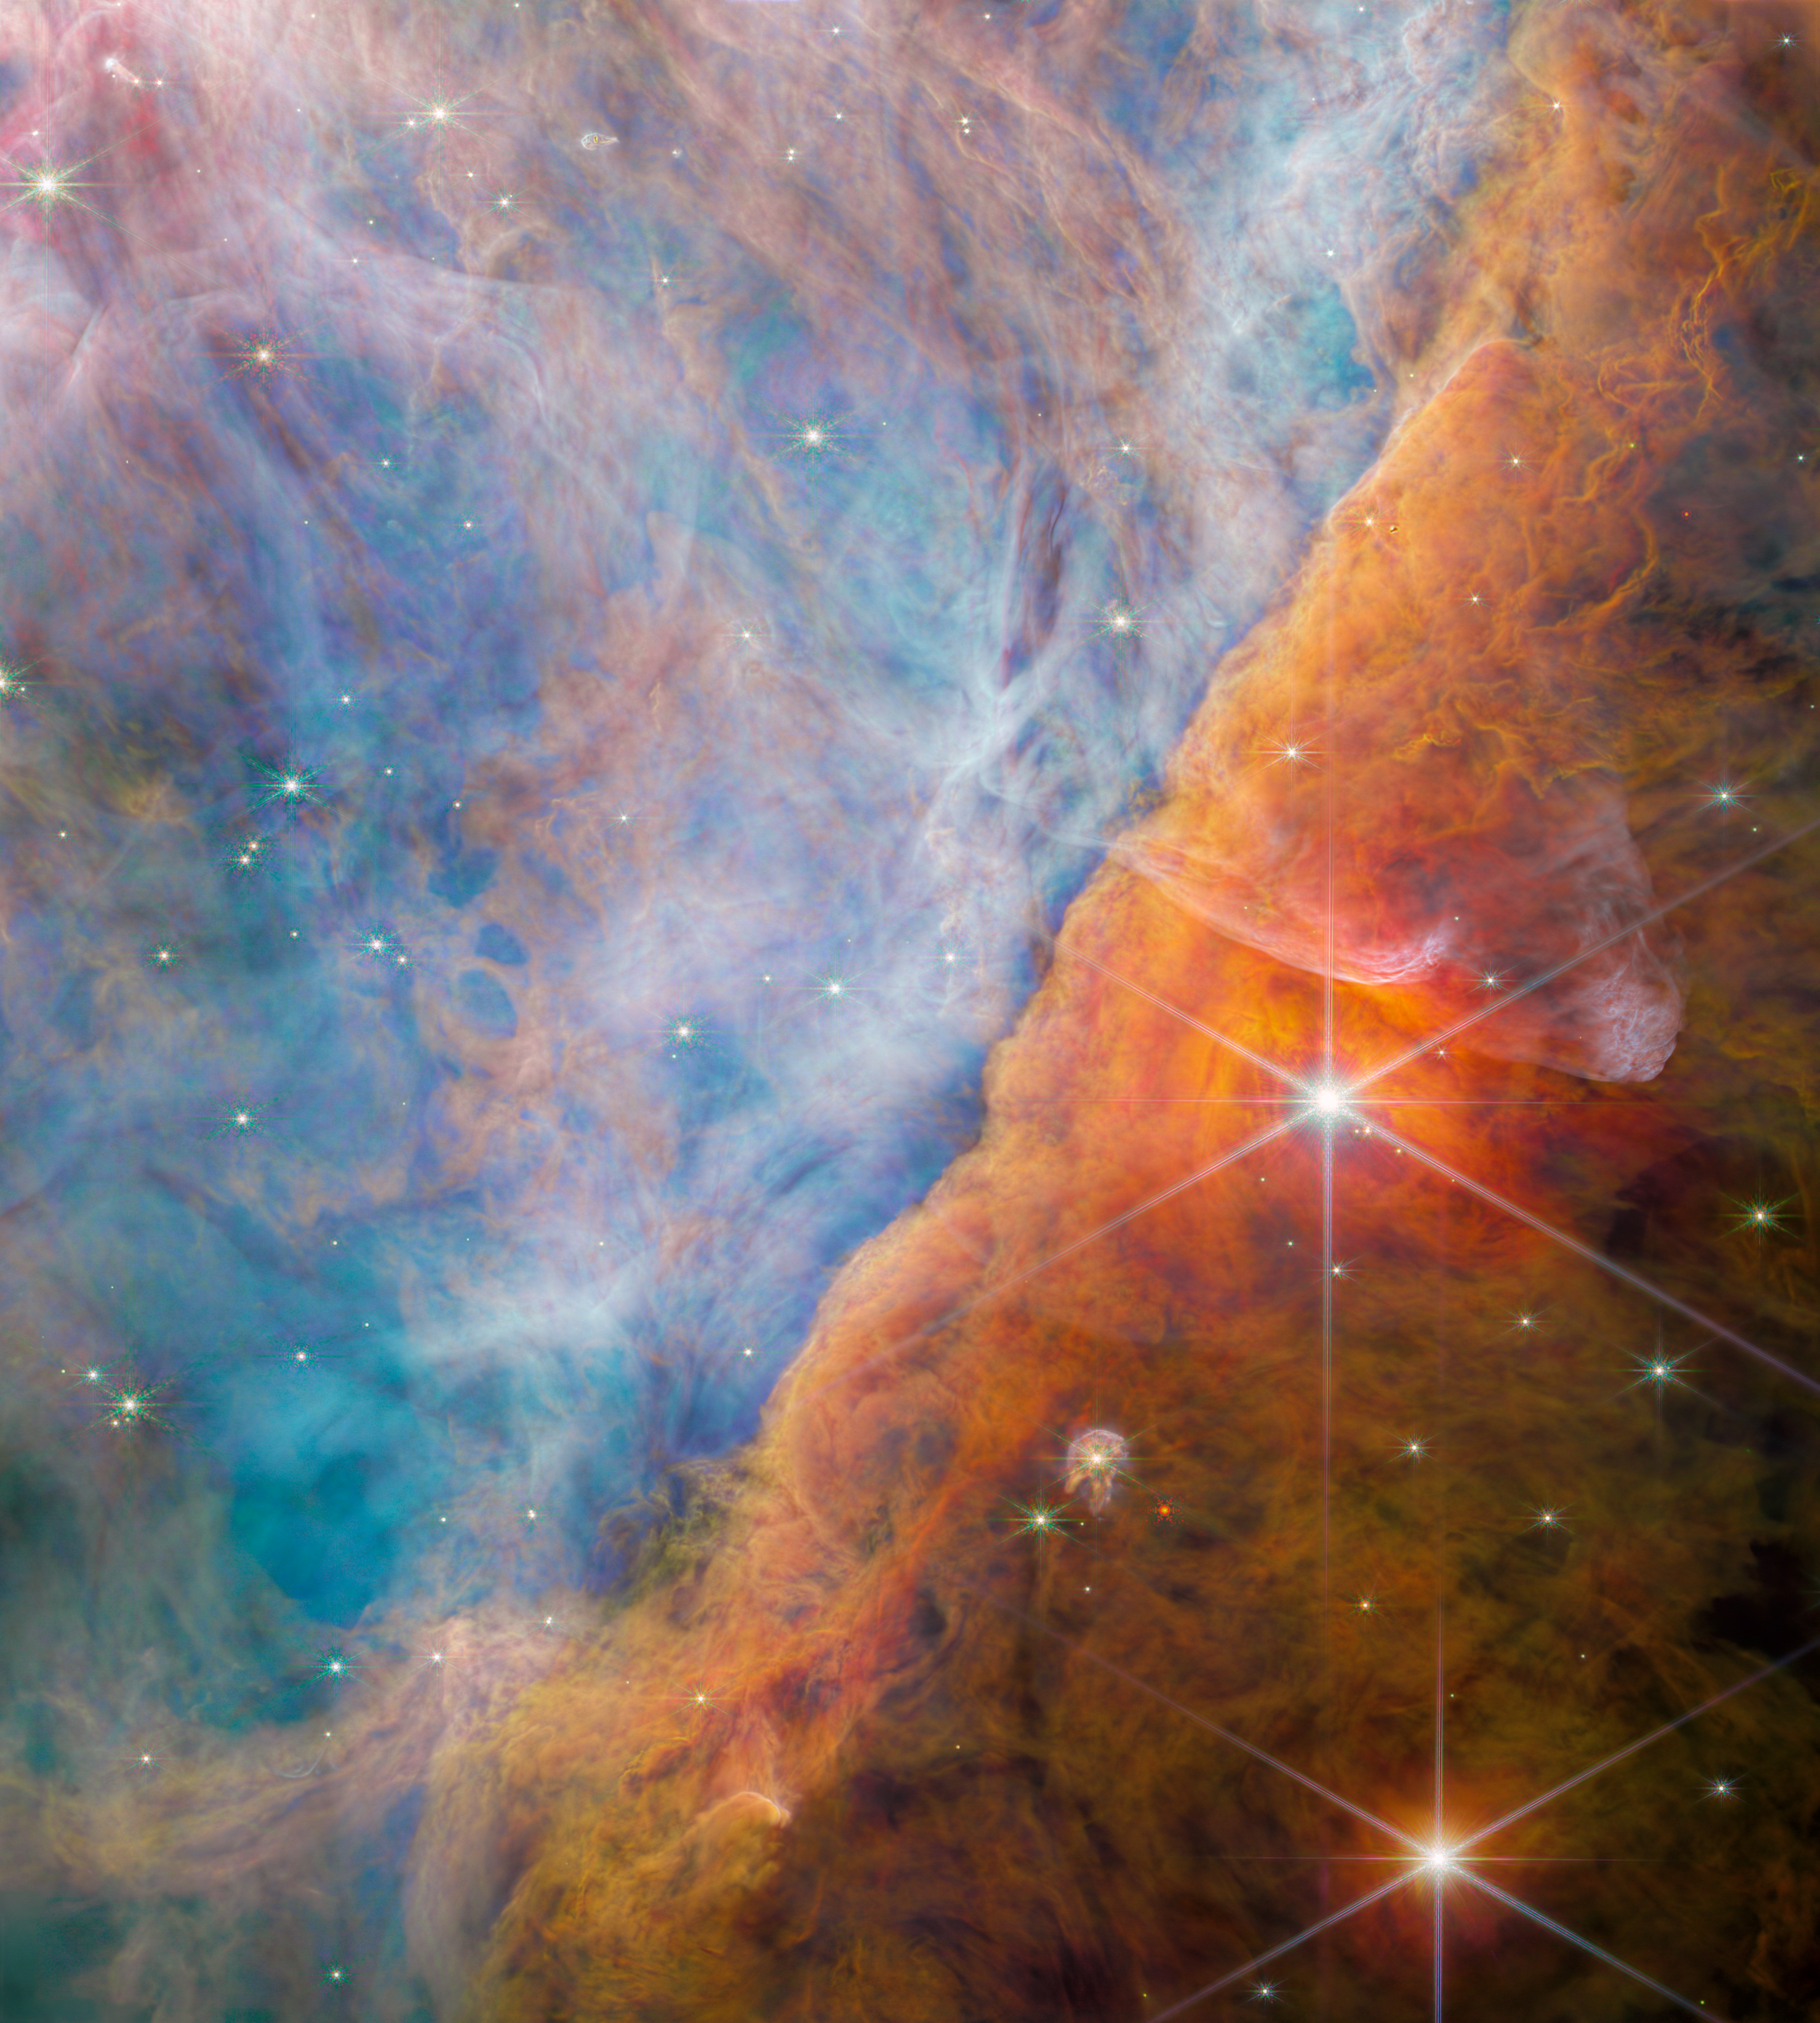

The Orion Bar region (NIRCam image)

An international team of scientists have used data collected by the NASA/ESA/CSA James Webb Space Telescope to detect a molecule known as the methyl cation (CH3+) for the first time, located in the protoplanetary disc surrounding a young star. They accomplished this feat with a cross-disciplinary expert analysis, including key input from laboratory spectroscopists. The vital role of CH3+ in interstellar carbon chemistry has been predicted since the 1970s, but Webb’s unique capabilities have finally made observing it possible — in a region of space where planets capable of accommodating life could eventually form.

This image is NIRCam’s view of the Orion Bar region studied by the team of astronomers. Bathed in harsh ultraviolet light from the stars of the Trapezium Cluster, it is an area of intense activity, with star formation and active astrochemistry. This made it a perfect place to study the exact impact that ultraviolet radiation has on the molecular makeup of the discs of gas and dust that surround new stars. The radiation erodes the nebula’s gas and dust in a process known as photoevaporation; this creates the rich tapestry of cavities and filaments that fill the view. The radiation also ionises the molecules, causing them to emit light — not only does this create a beautiful vista, it also allows astronomers to study the molecules using the spectrum of their emitted light obtained with Webb’s MIRI and NIRSpec instruments.

The two very large, bright stars are two of the three stars in the θ² Orionis system — the Trapezium Cluster is also known as θ¹ Orionis. The brightest star here, θ² Orionis A, is surrounded by particularly bright and red puffs of dust, which are reflecting the star’s light towards Earth. Its great brightness — it is visible with the naked eye — is due to the fact that θ² Orionis A is itself a ternary system made of three closely bound bright stars.

There are more proplyds visible in this image than just d203-506 — the Orion Nebula is replete with such new stars. In the very top left, a tiny star is visible within a long, dusty cocoon. This globule has formed from the star’s protoplanetary disc, as the disc is broken down by the energetic radiation of the Trapezium Cluster. Around the globule, a round shockwave is strikingly visible moving through the gas of the Orion Nebula.

Credit: ESA/Webb, NASA, CSA, M. Zamani (ESA/Webb), the PDRs4All ERS Team